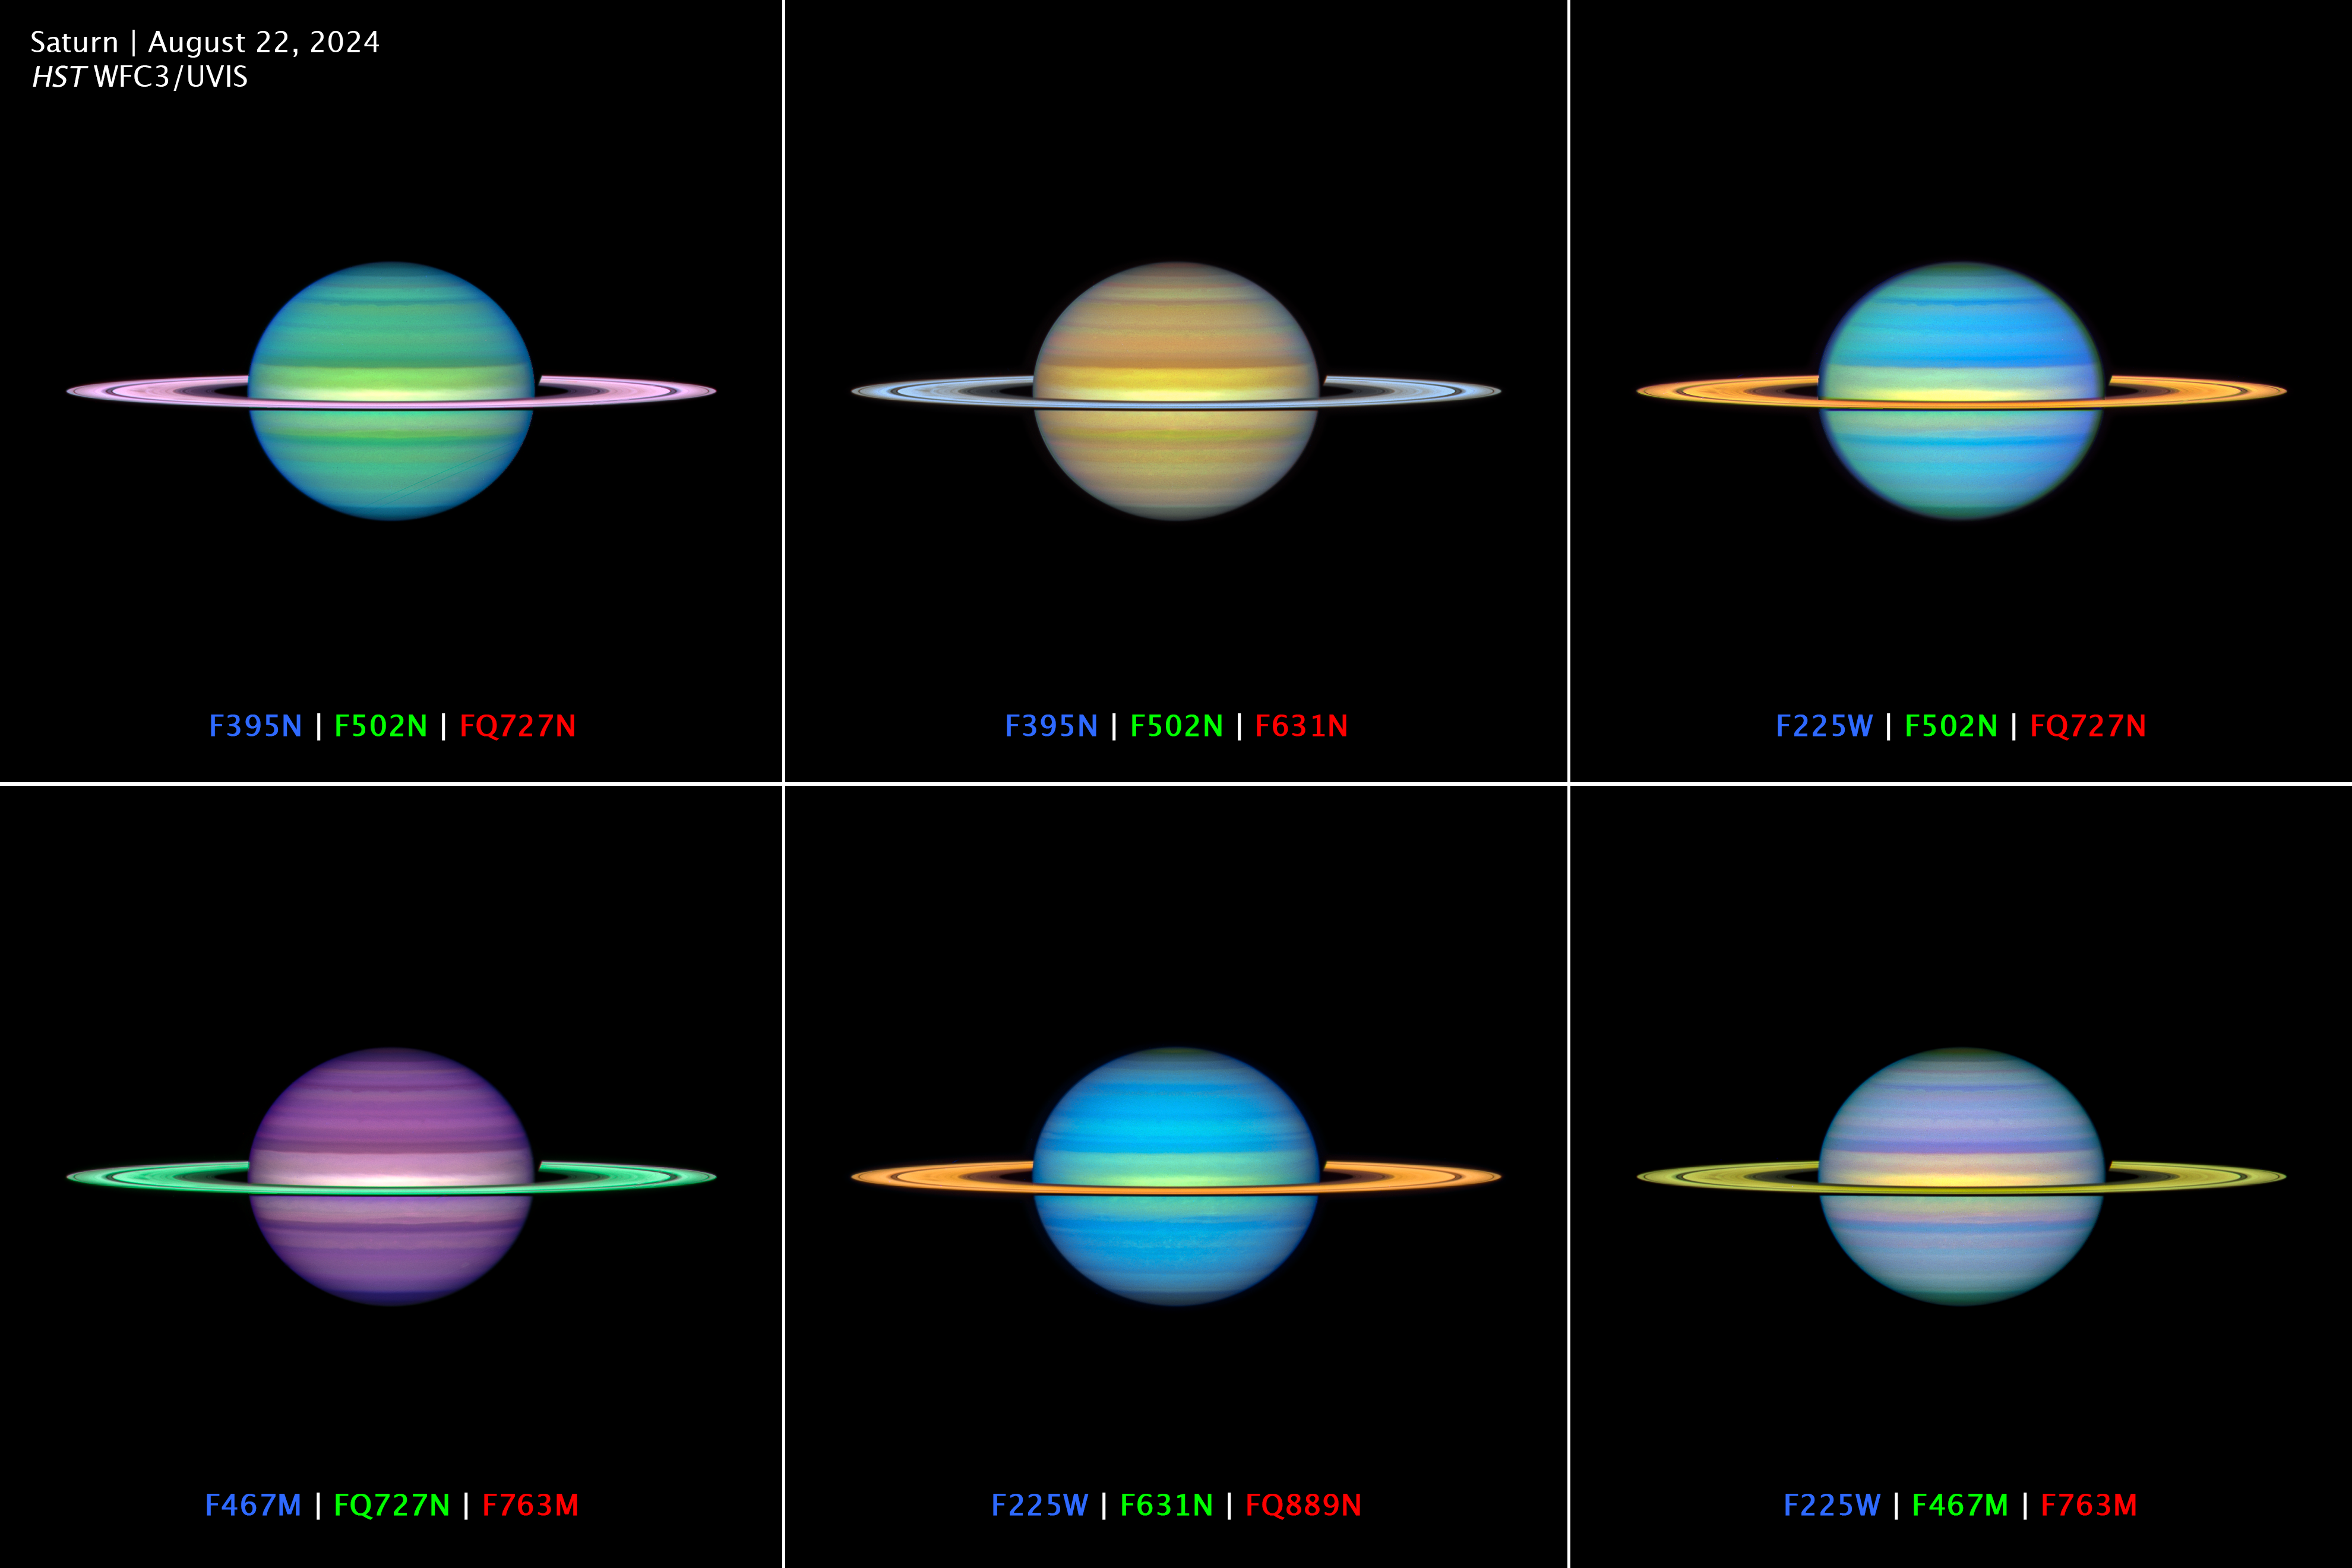

Multiwavelength OPAL Saturn observation 2024

An array of Saturn images depict real data from multiple filters mapped onto the RGB colors perceptible to the human eye. Each filter combination emphasizes the subtle differences in cloud altitude or composition. Infrared spectra from the Cassini mission suggested that Saturn’s aerosol particles may have even more complex chemical diversity than on Jupiter.

Credit: NASA, ESA, A. Simon (NASA/GSFC), M. Wong (UC Berkeley), J. DePasquale (STScI)